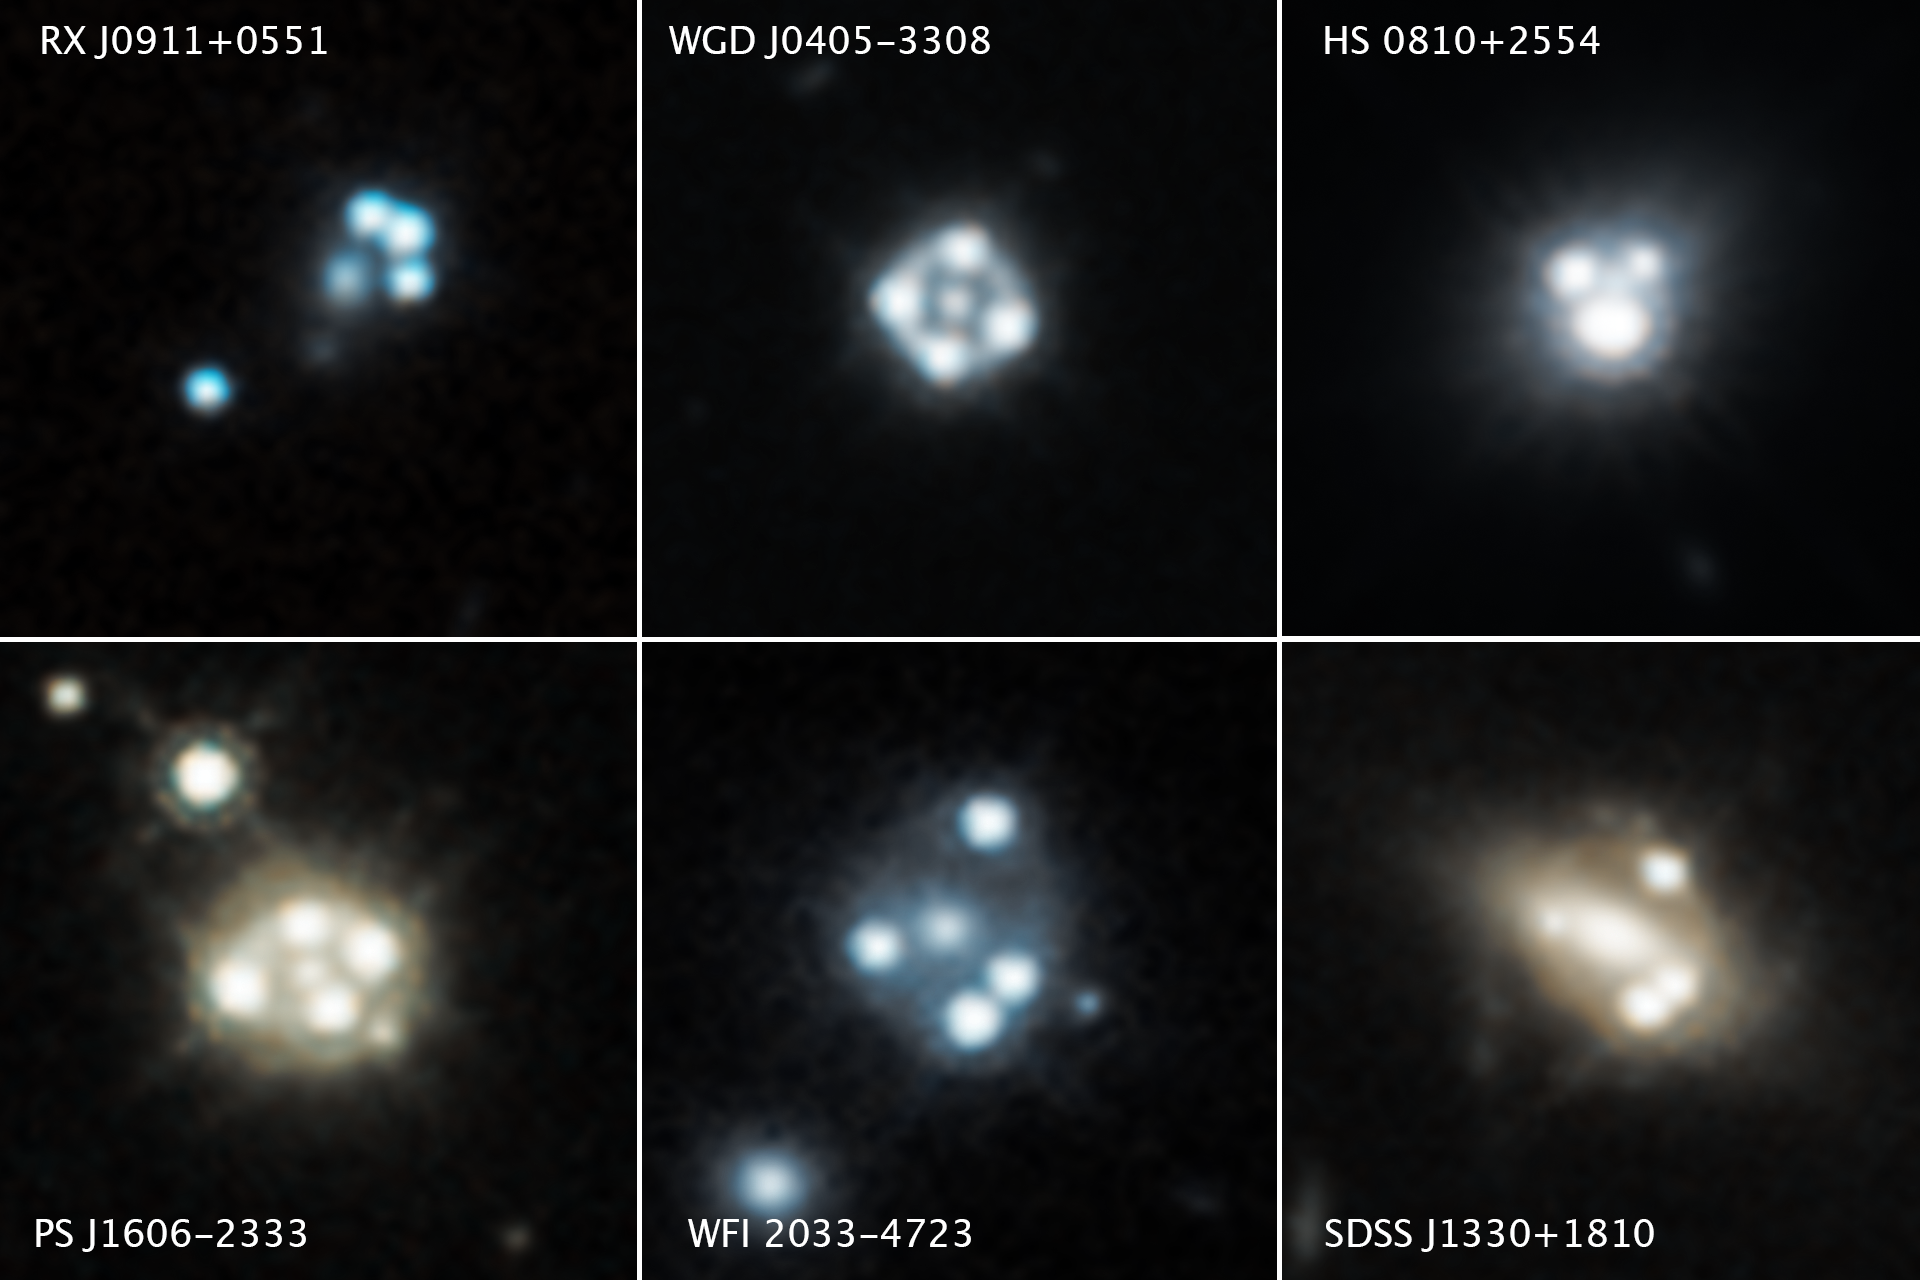

Quasars' Multiple Images Shed Light on Tiny Dark Matter Clumps

Each of these Hubble Space Telescope snapshots reveals four distorted images of a background quasar and its host galaxy surrounding the central core of a foreground massive galaxy.

The gravity of the massive foreground galaxy is acting like a magnifying glass by warping the quasar’s light in an effect called gravitational lensing. Quasars are extremely distant cosmic streetlights produced by active black holes. Such quadruple images of quasars are rare because of the nearly exact alignment needed between the foreground galaxy and background quasar.

Astronomers used the gravitational lensing effect to detect the smallest clumps of dark matter ever found. The clumps are located along the telescope's line of sight to the quasars, as well as in and around the foreground lensing galaxies.

The presence of the dark matter concentrations alters the apparent brightness and position of each distorted quasar image. Astronomers compared these measurements with predictions of how the quasar images would look without the influence of the dark matter clumps. The researchers used these measurements to calculate the masses of the tiny dark matter concentrations.

Hubble's Wide Field Camera 3 captured the near-infrared light from each quasar and dispersed it into its component colors for study with spectroscopy. The images were taken between 2015 and 2018.

Credit: NASA, ESA, A. Nierenberg (JPL) and T. Treu (UCLA)